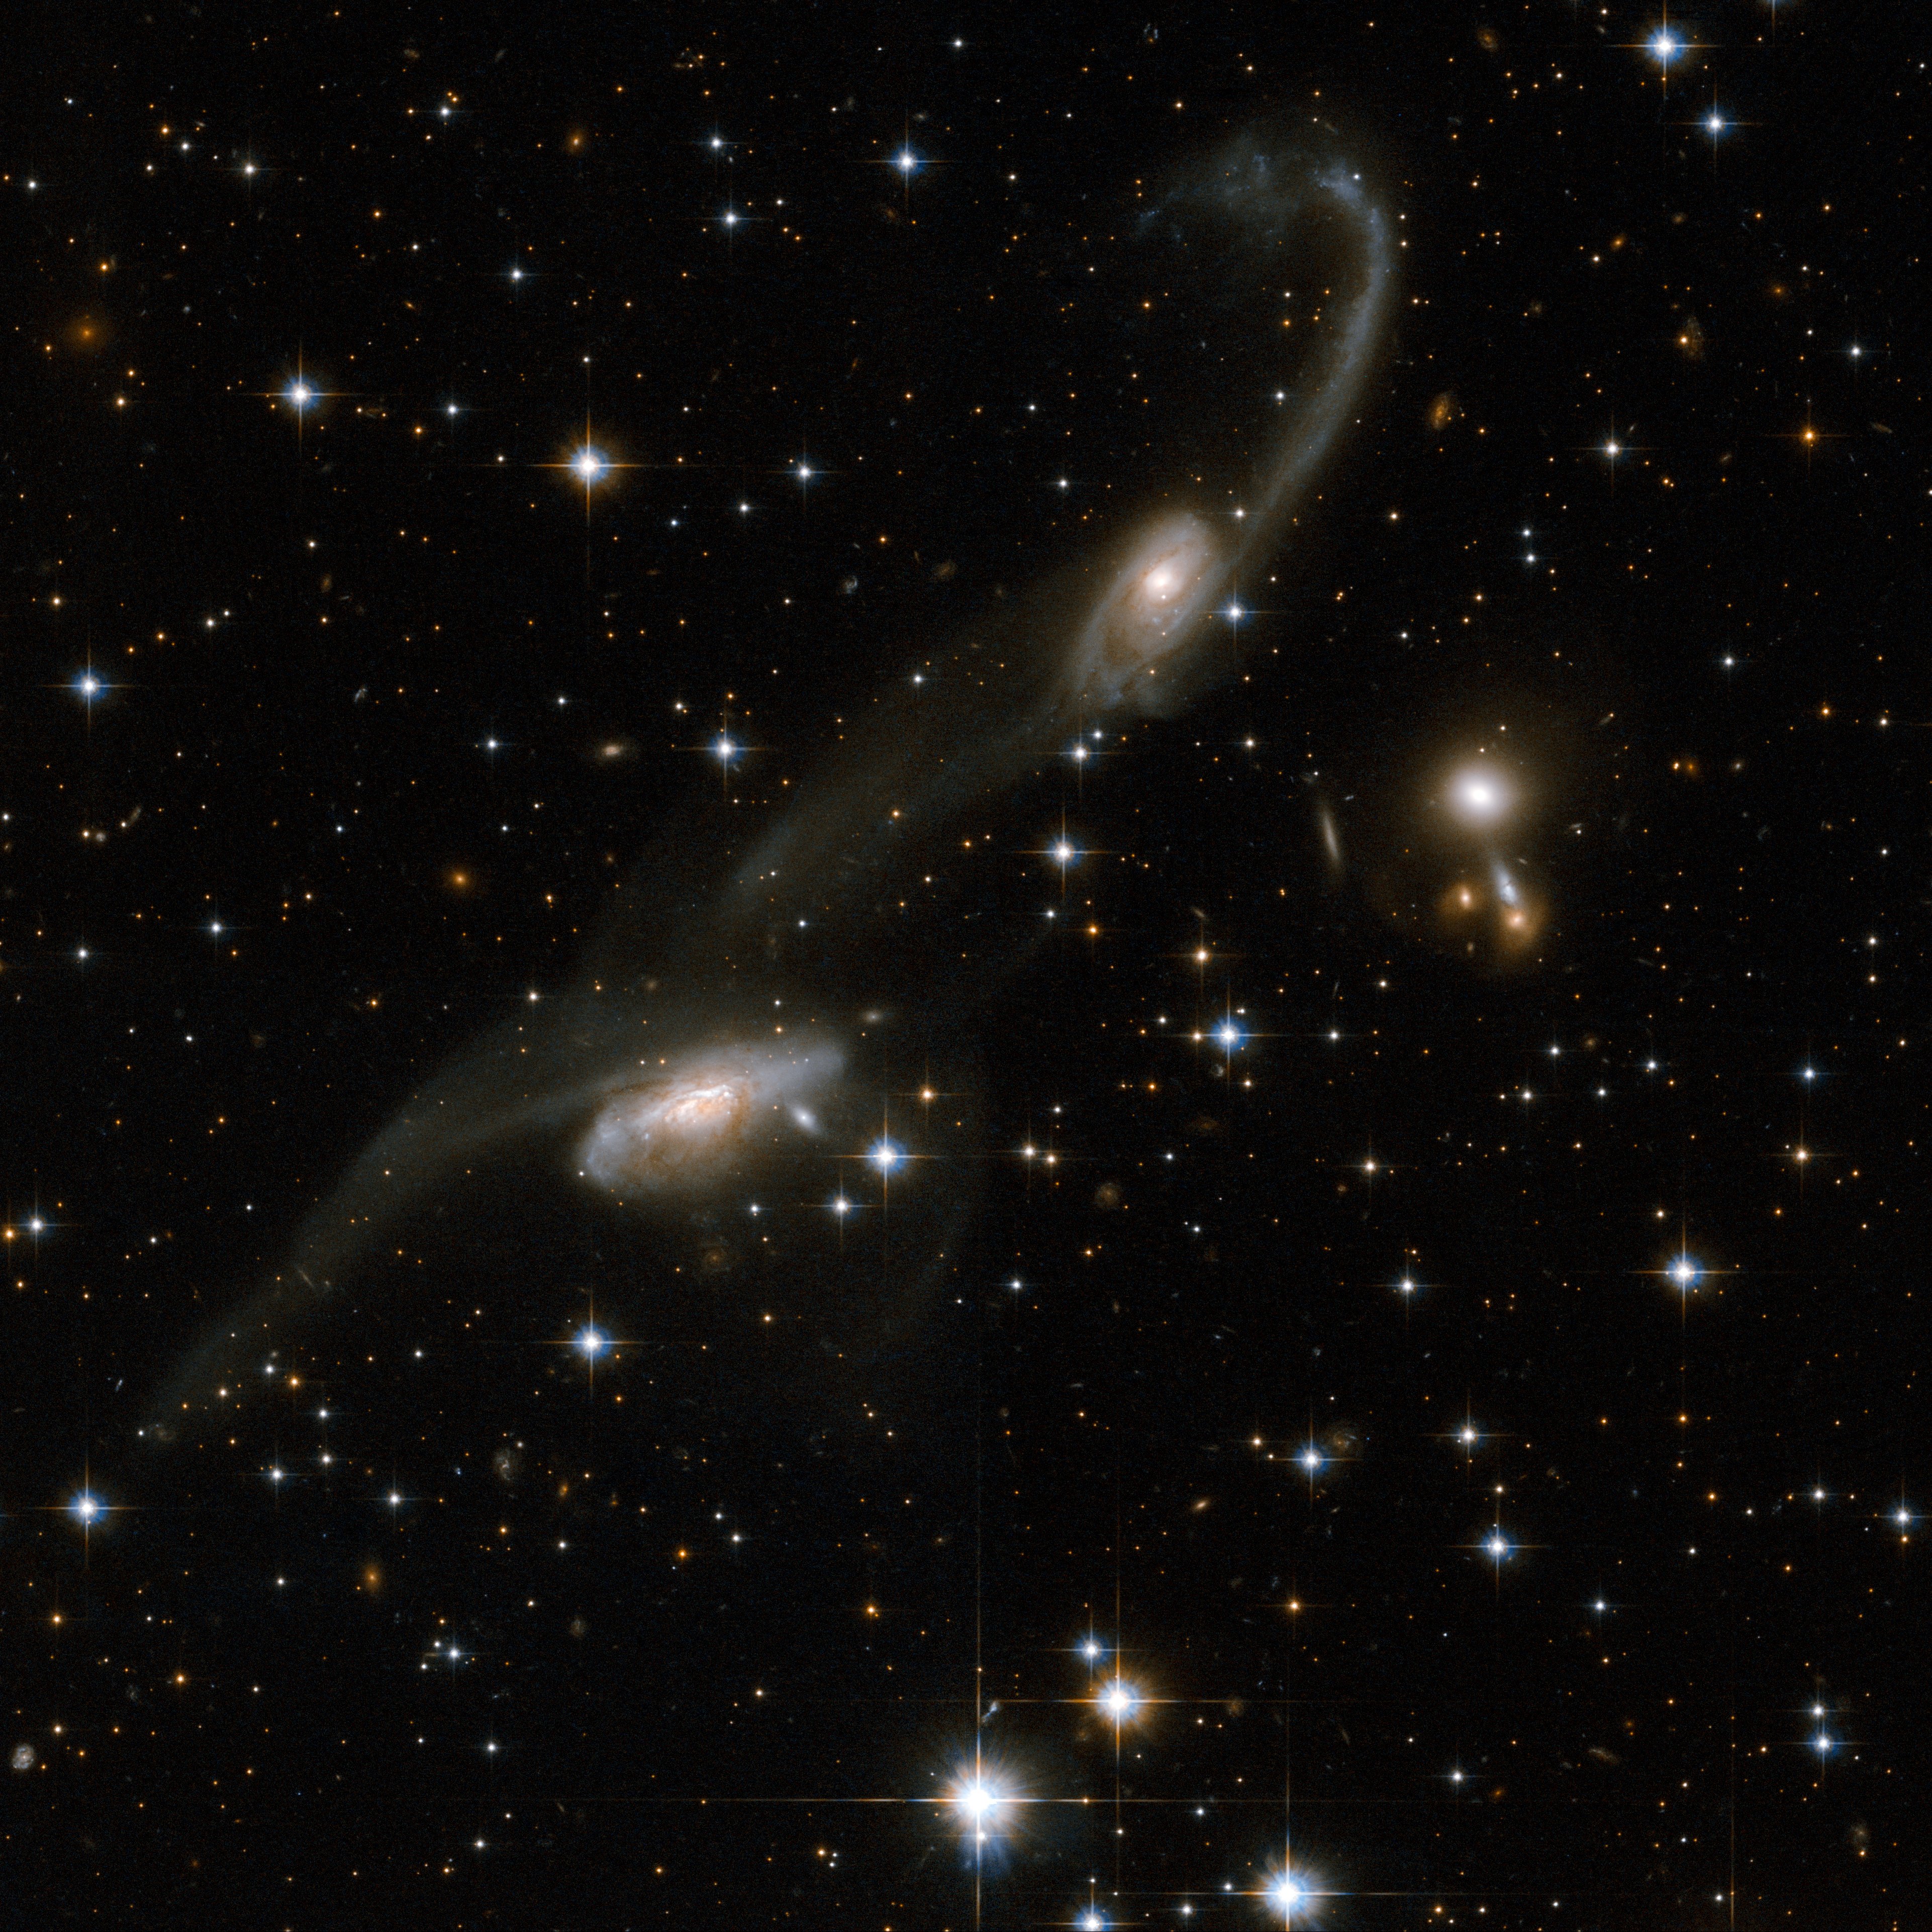

ESO 69-6

The galaxies of this beautiful interacting pair bear some resemblance to musical notes on a stave. Long tidal tails sweep out from the two galaxies: gas and stars were stripped out and torn away from the outer regions of the galaxies. The presence of these tails is the unique signature of an interaction. ESO 69-6 is located in the constellation of Triangulum Australe, the Southern Triangle, about 650 million light-years away from Earth.

This image is part of a large collection of 59 images of merging galaxies taken by the Hubble Space Telescope and released on the occasion of its 18th anniversary on 24th April 2008.

Credit: NASA, ESA, the Hubble Heritage Team (STScI/AURA)-ESA/Hubble Collaboration and A. Evans (University of Virginia, Charlottesville/NRAO/Stony Brook University)